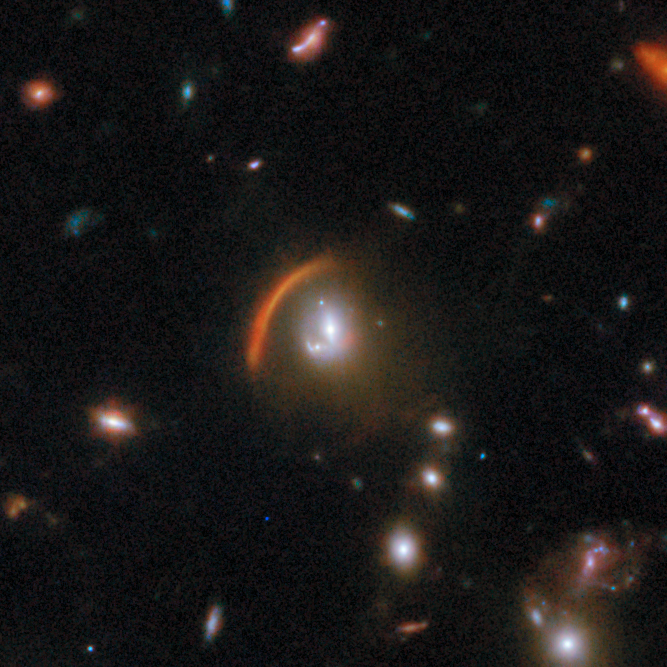

Gravitational lens COSJ100013+023424

The foreground galaxy whose gravity is bending the light from more distant objects is seen as it was when the Universe was 6.4 billion years old. The more distant lensed galaxy, which appears as an arc, was invisible in previous NASA/ESA Hubble Space Telescope observations and has now been revealed by Webb’s sensitive infrared eyes. This discovery is crucial for studying star formation in distant galaxies.

This gravitational lens is one of eight featured in the September 2025 Picture of the Month.

Credit: ESA/Webb, NASA & CSA, G. Gozaliasl, A. Koekemoer, M. Franco